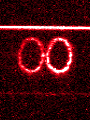

STIS chemically analyzes the ring around SN 1987a

These images from the Hubble's Space Telescope Imaging Spectrograph (STIS) provide a new and unprecedented look at one of the most unique and complex structures in the universe -- a light-year wide ring of glowing gas around supernova 1987A, the nearest stellar explosion in 400 years, which occurred in February 1987.

Credit: George Sonneborn (GSFC) and NASA/ESA